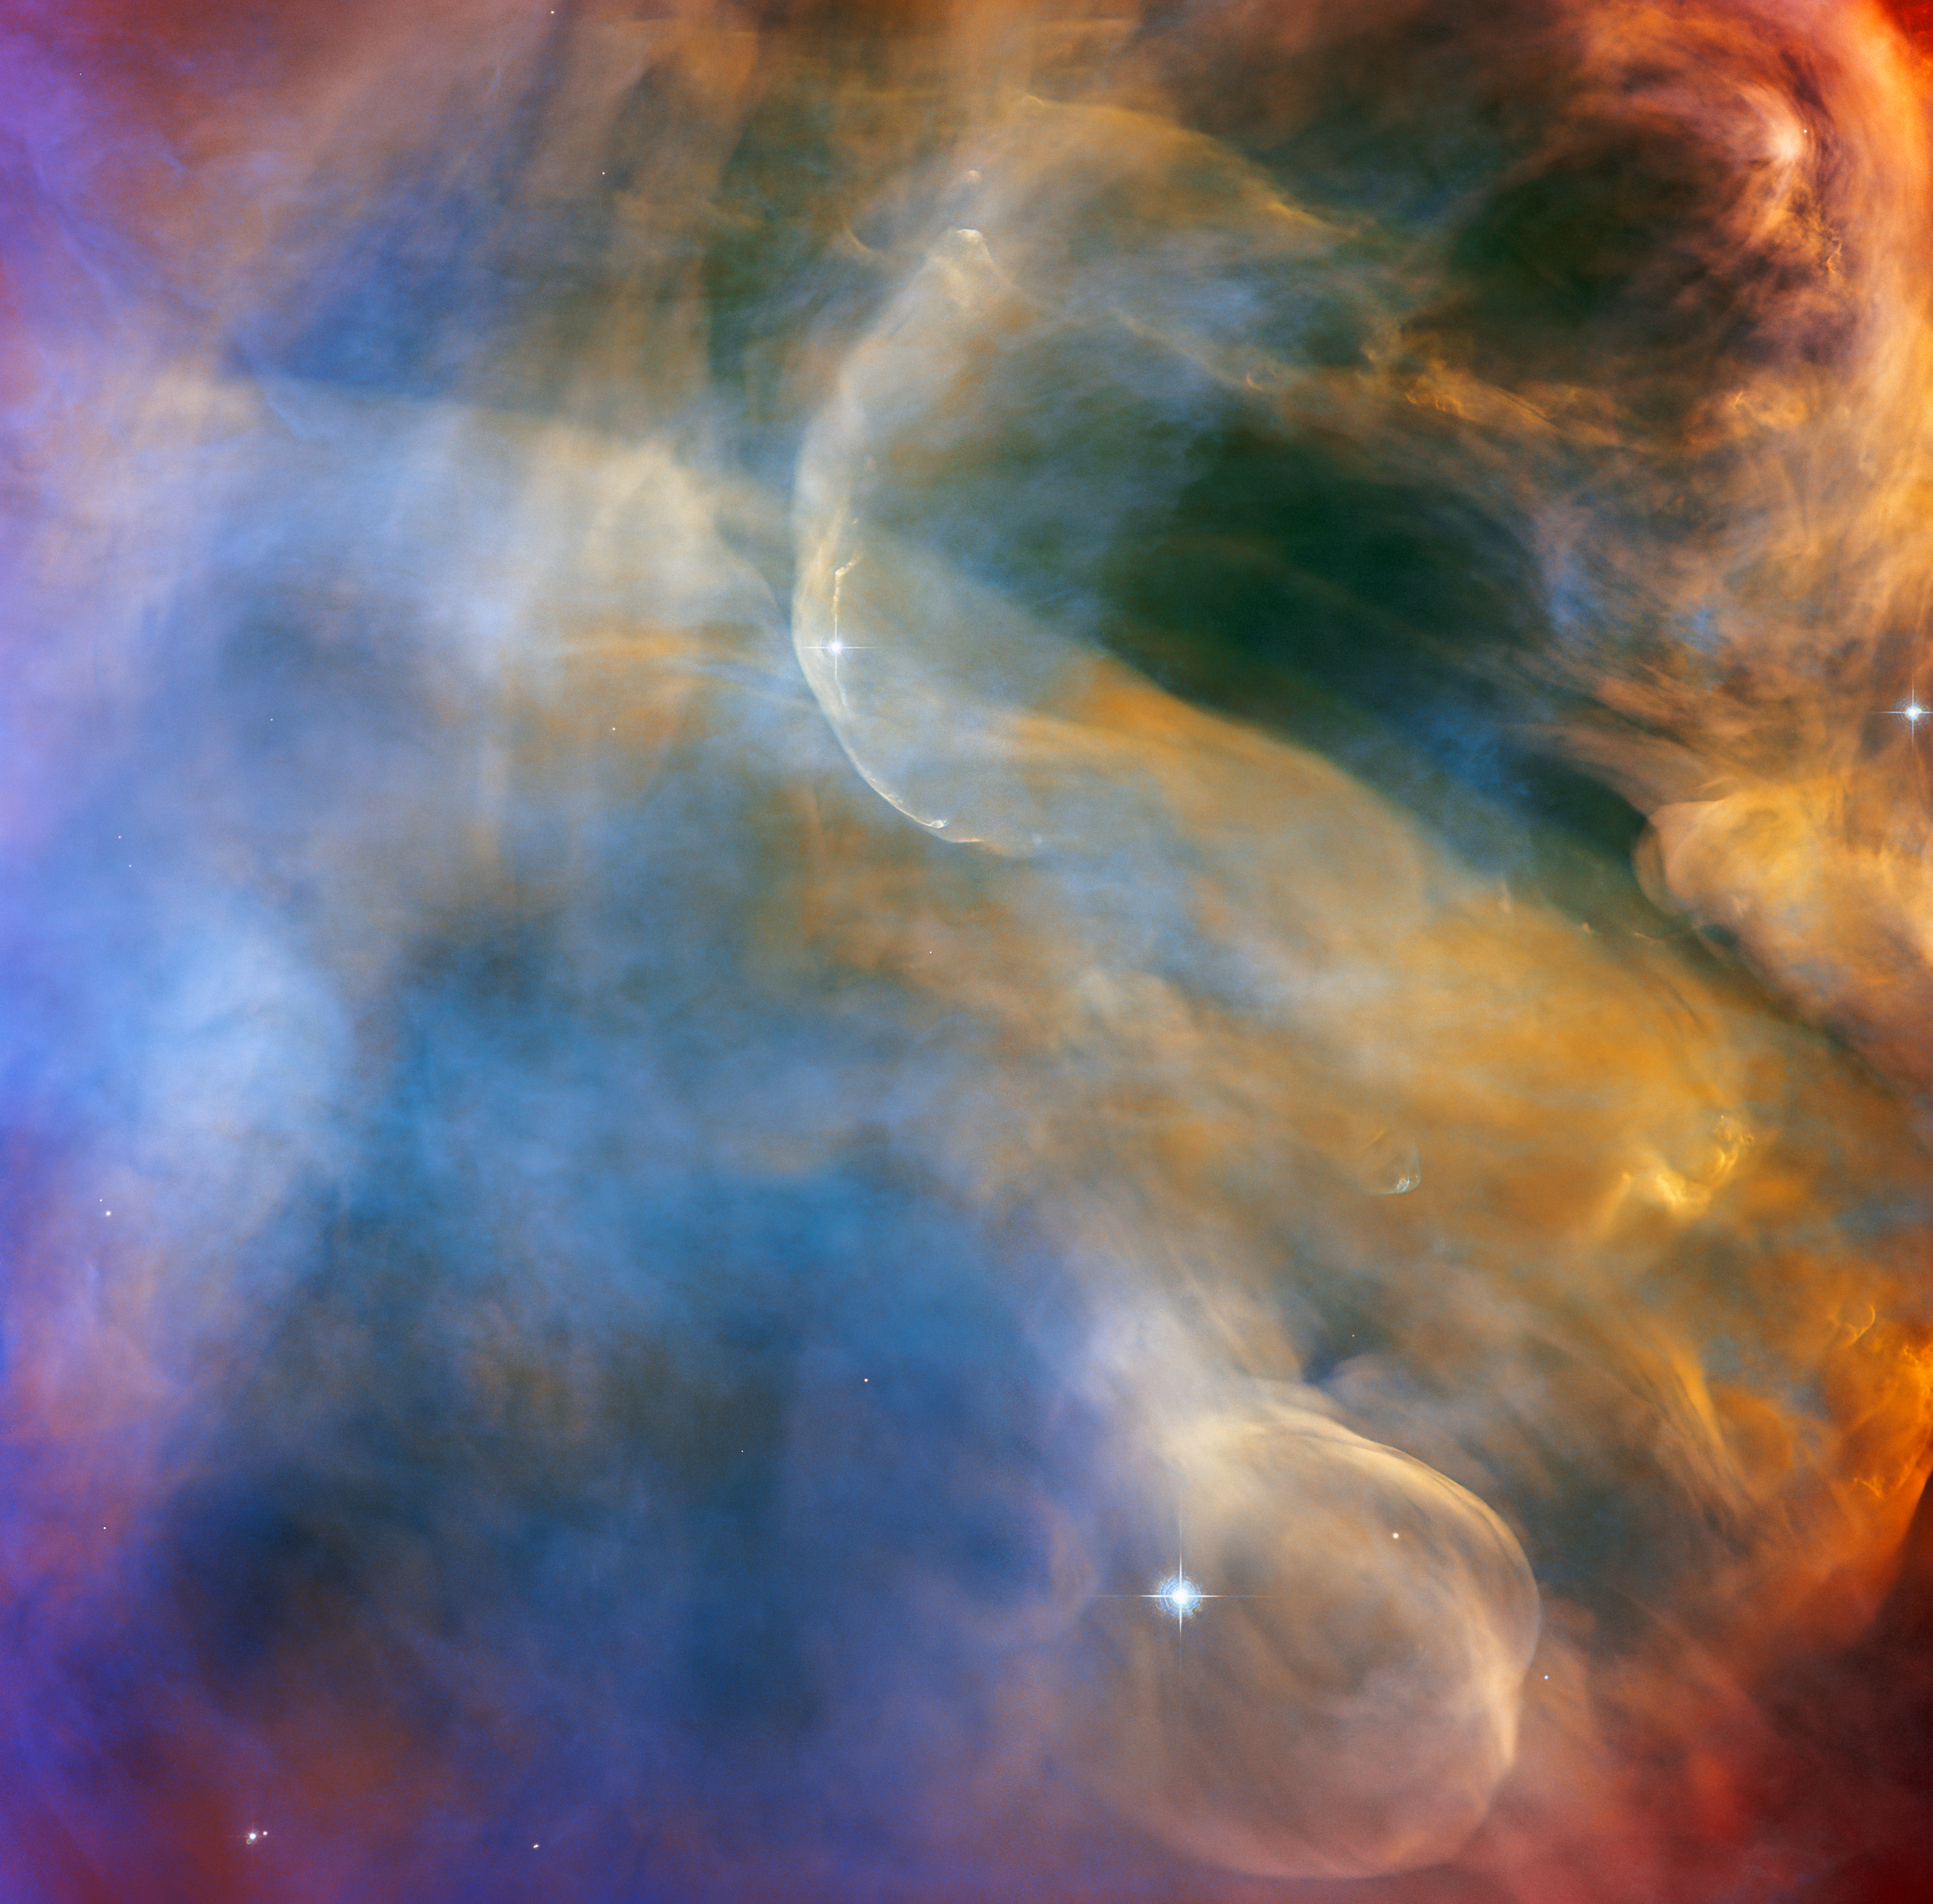

Celestial Cloudscape in the Orion Nebula

This celestial cloudscape from the NASA/ESA Hubble Space Telescope captures the colourful region surrounding the Herbig-Haro object HH 505. Herbig-Haro objects are luminous regions surrounding newborn stars, and are formed when stellar winds or jets of gas spewing from these newborn stars form shockwaves colliding with nearby gas and dust at high speeds. In the case of HH 505, these outflows originate from the star IX Ori, which lies on the outskirts of the Orion Nebula around 1000 light-years from Earth. The outflows themselves are visible as gracefully curving structures at the top and bottom of this image, and are distorted into sinuous curves by their interaction with the large-scale flow of gas and dust from the core of the Orion Nebula.

This observation was captured with Hubble’s Advanced Camera for Surveys (ACS) by astronomers studying the properties of outflows and protoplanetary discs. The Orion Nebula is awash in intense ultraviolet radiation from bright young stars. The shockwaves formed by the outflows are brightly visible to Hubble, but the slower-moving currents of stellar material are also highlighted by this radiation. That allows astronomers to directly observe jets and outflows and learn more about their structures.

The Orion Nebula is a dynamic region of dust and gas where thousands of stars are forming, and is the closest region of massive star formation to Earth. As a result, it is one of the most scrutinised areas of the night sky and has often been a target for Hubble. This observation was also part of a spellbinding Hubble mosaic of the Orion Nebula, which combined 520 ACS images in five different colours to create the sharpest view ever taken of the region.

Credit: ESA/Hubble & NASA, J. Bally Acknowledgement: M. H. Özsaraç